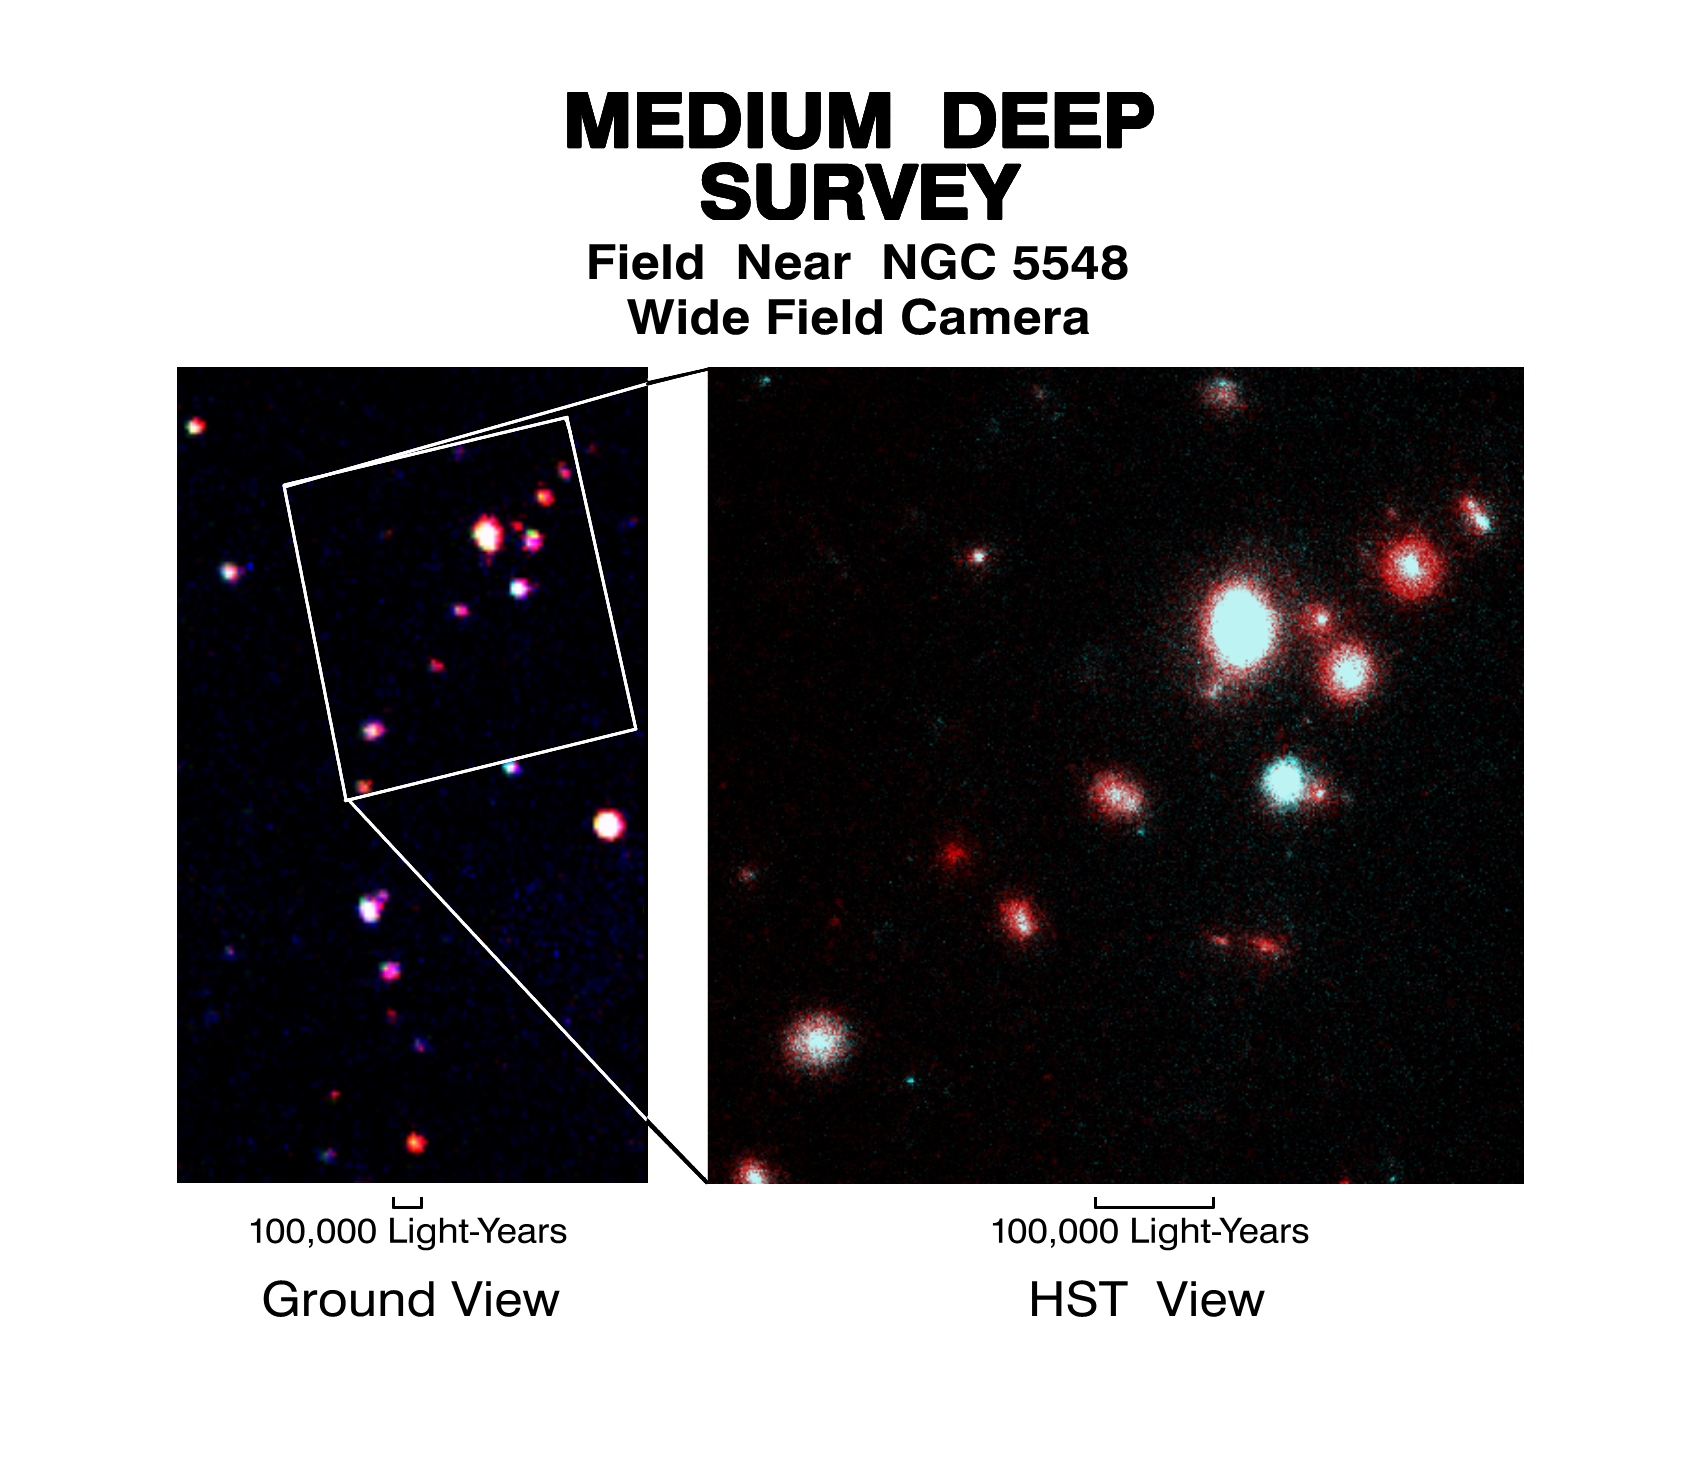

Medium deep survey

Hubble Space Telescope and ground-based view of the field near galaxy NGC 5548.

Credit: Richard Griffiths, The Johns Hopkins University and NASA/ESA